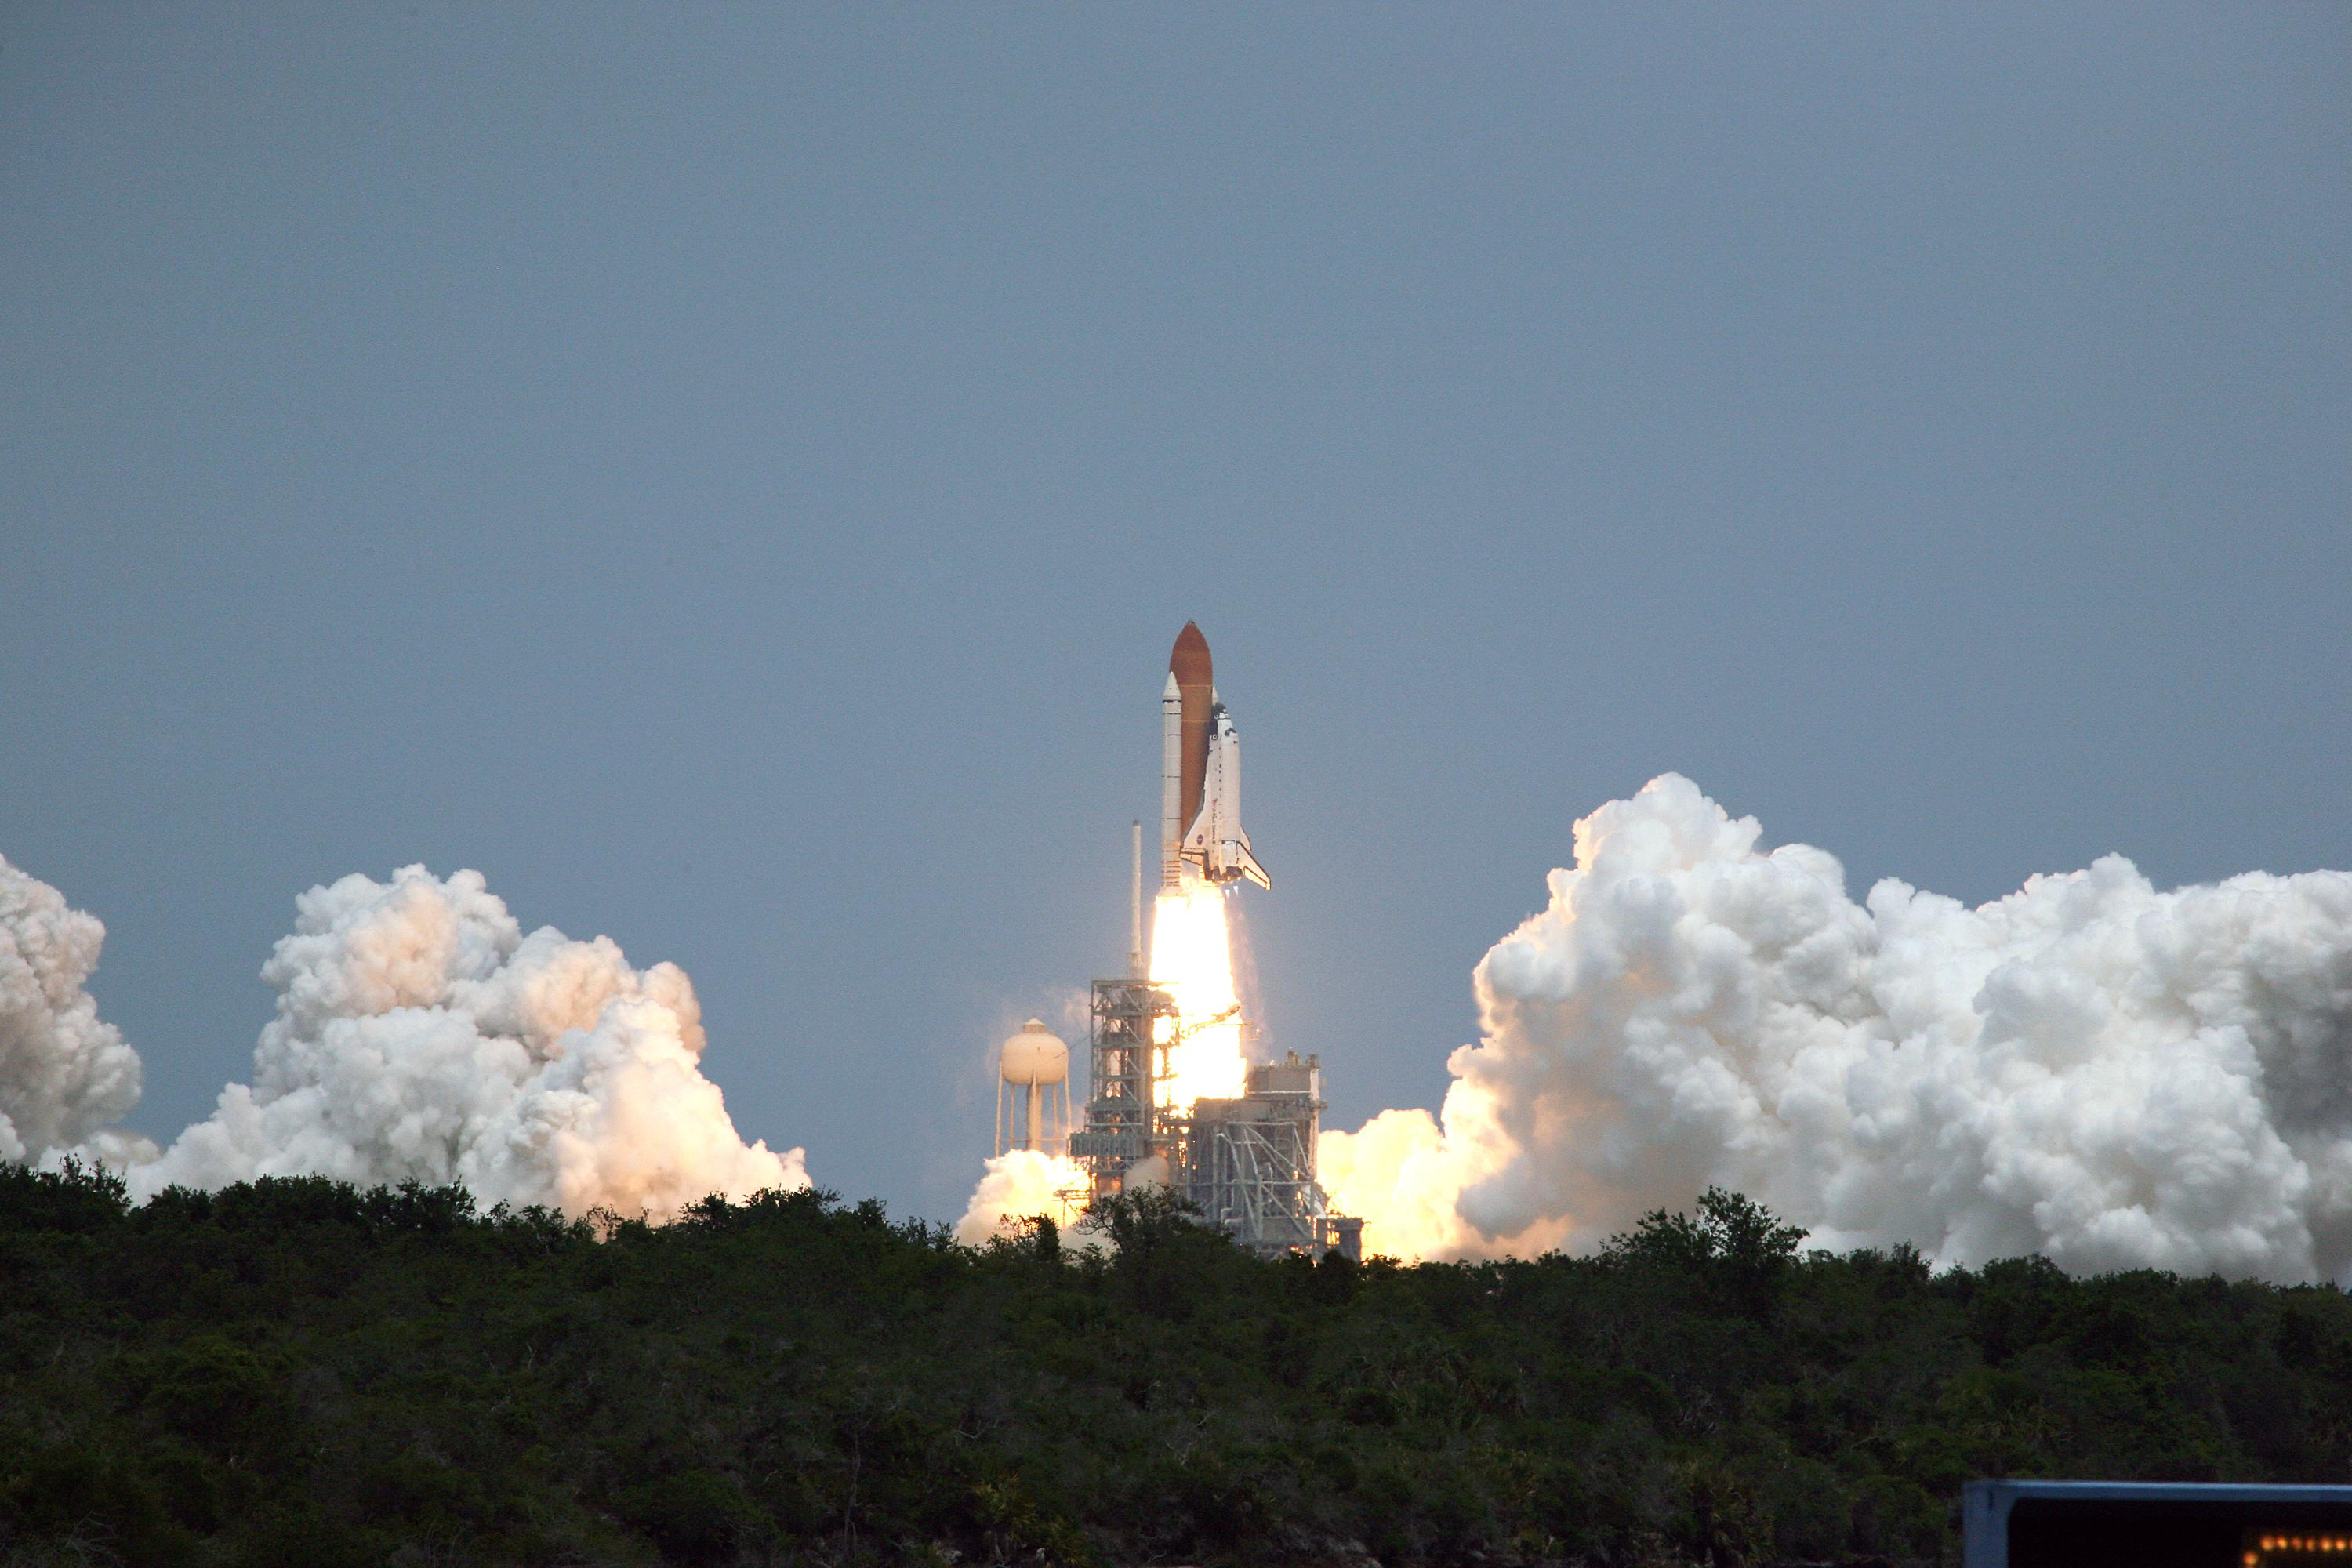

SM4: Atlantis Liftoff

White clouds of smoke and steam sandwich space shuttle Atlantis as it roars off Launch Pad 39A at NASA's Kennedy space Center in Florida with its crew of seven for a rendezvous with NASA/ESA Hubble Space Telescope.

Credit: NASA/Fletcher Hildreth